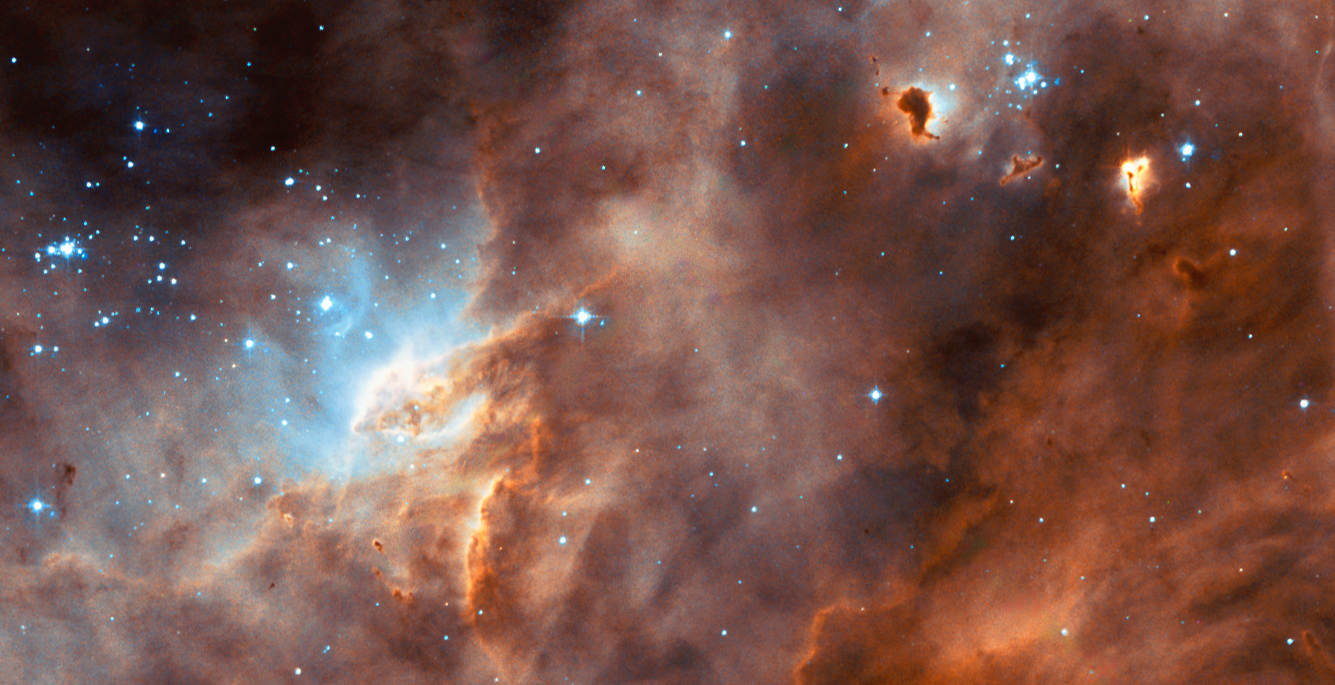

Hubble studies sequences of star formation in neighbouring galaxy

The NASA/ESA Hubble Space Telescope captures the iridescent tapestry of star birth in a neighbouring galaxy in this panoramic view of glowing gas, dark dust clouds, and young, hot stars. The star-forming region, catalogued as N11B lies in the Large Magellanic Cloud (LMC), located only 160,000 light-years from Earth. With its high resolution, the Hubble Space Telescope is able to view details of star formation in the LMC as easily as ground-based telescopes are able to observe stellar formation within our own Milky Way galaxy.

Our neighbourhood galaxy the Large Magellanic Cloud (LMC) lies in the Constellation of Dorado and is sprinkled with a number of regions harbouring recent and ongoing star formation. One of these star-forming region, N11B, is shown in this Hubble image. It is a subregion within a larger area of star formation called N11. N11 is the second largest star-forming region in LMC. It is only surpassed in the size and activity by "the king of stellar nurseries", 30 Doradus, located at the opposite side of LMC.

Credit: NASA/ESA and the Hubble Heritage Team (AURA/STScI/HEIC)